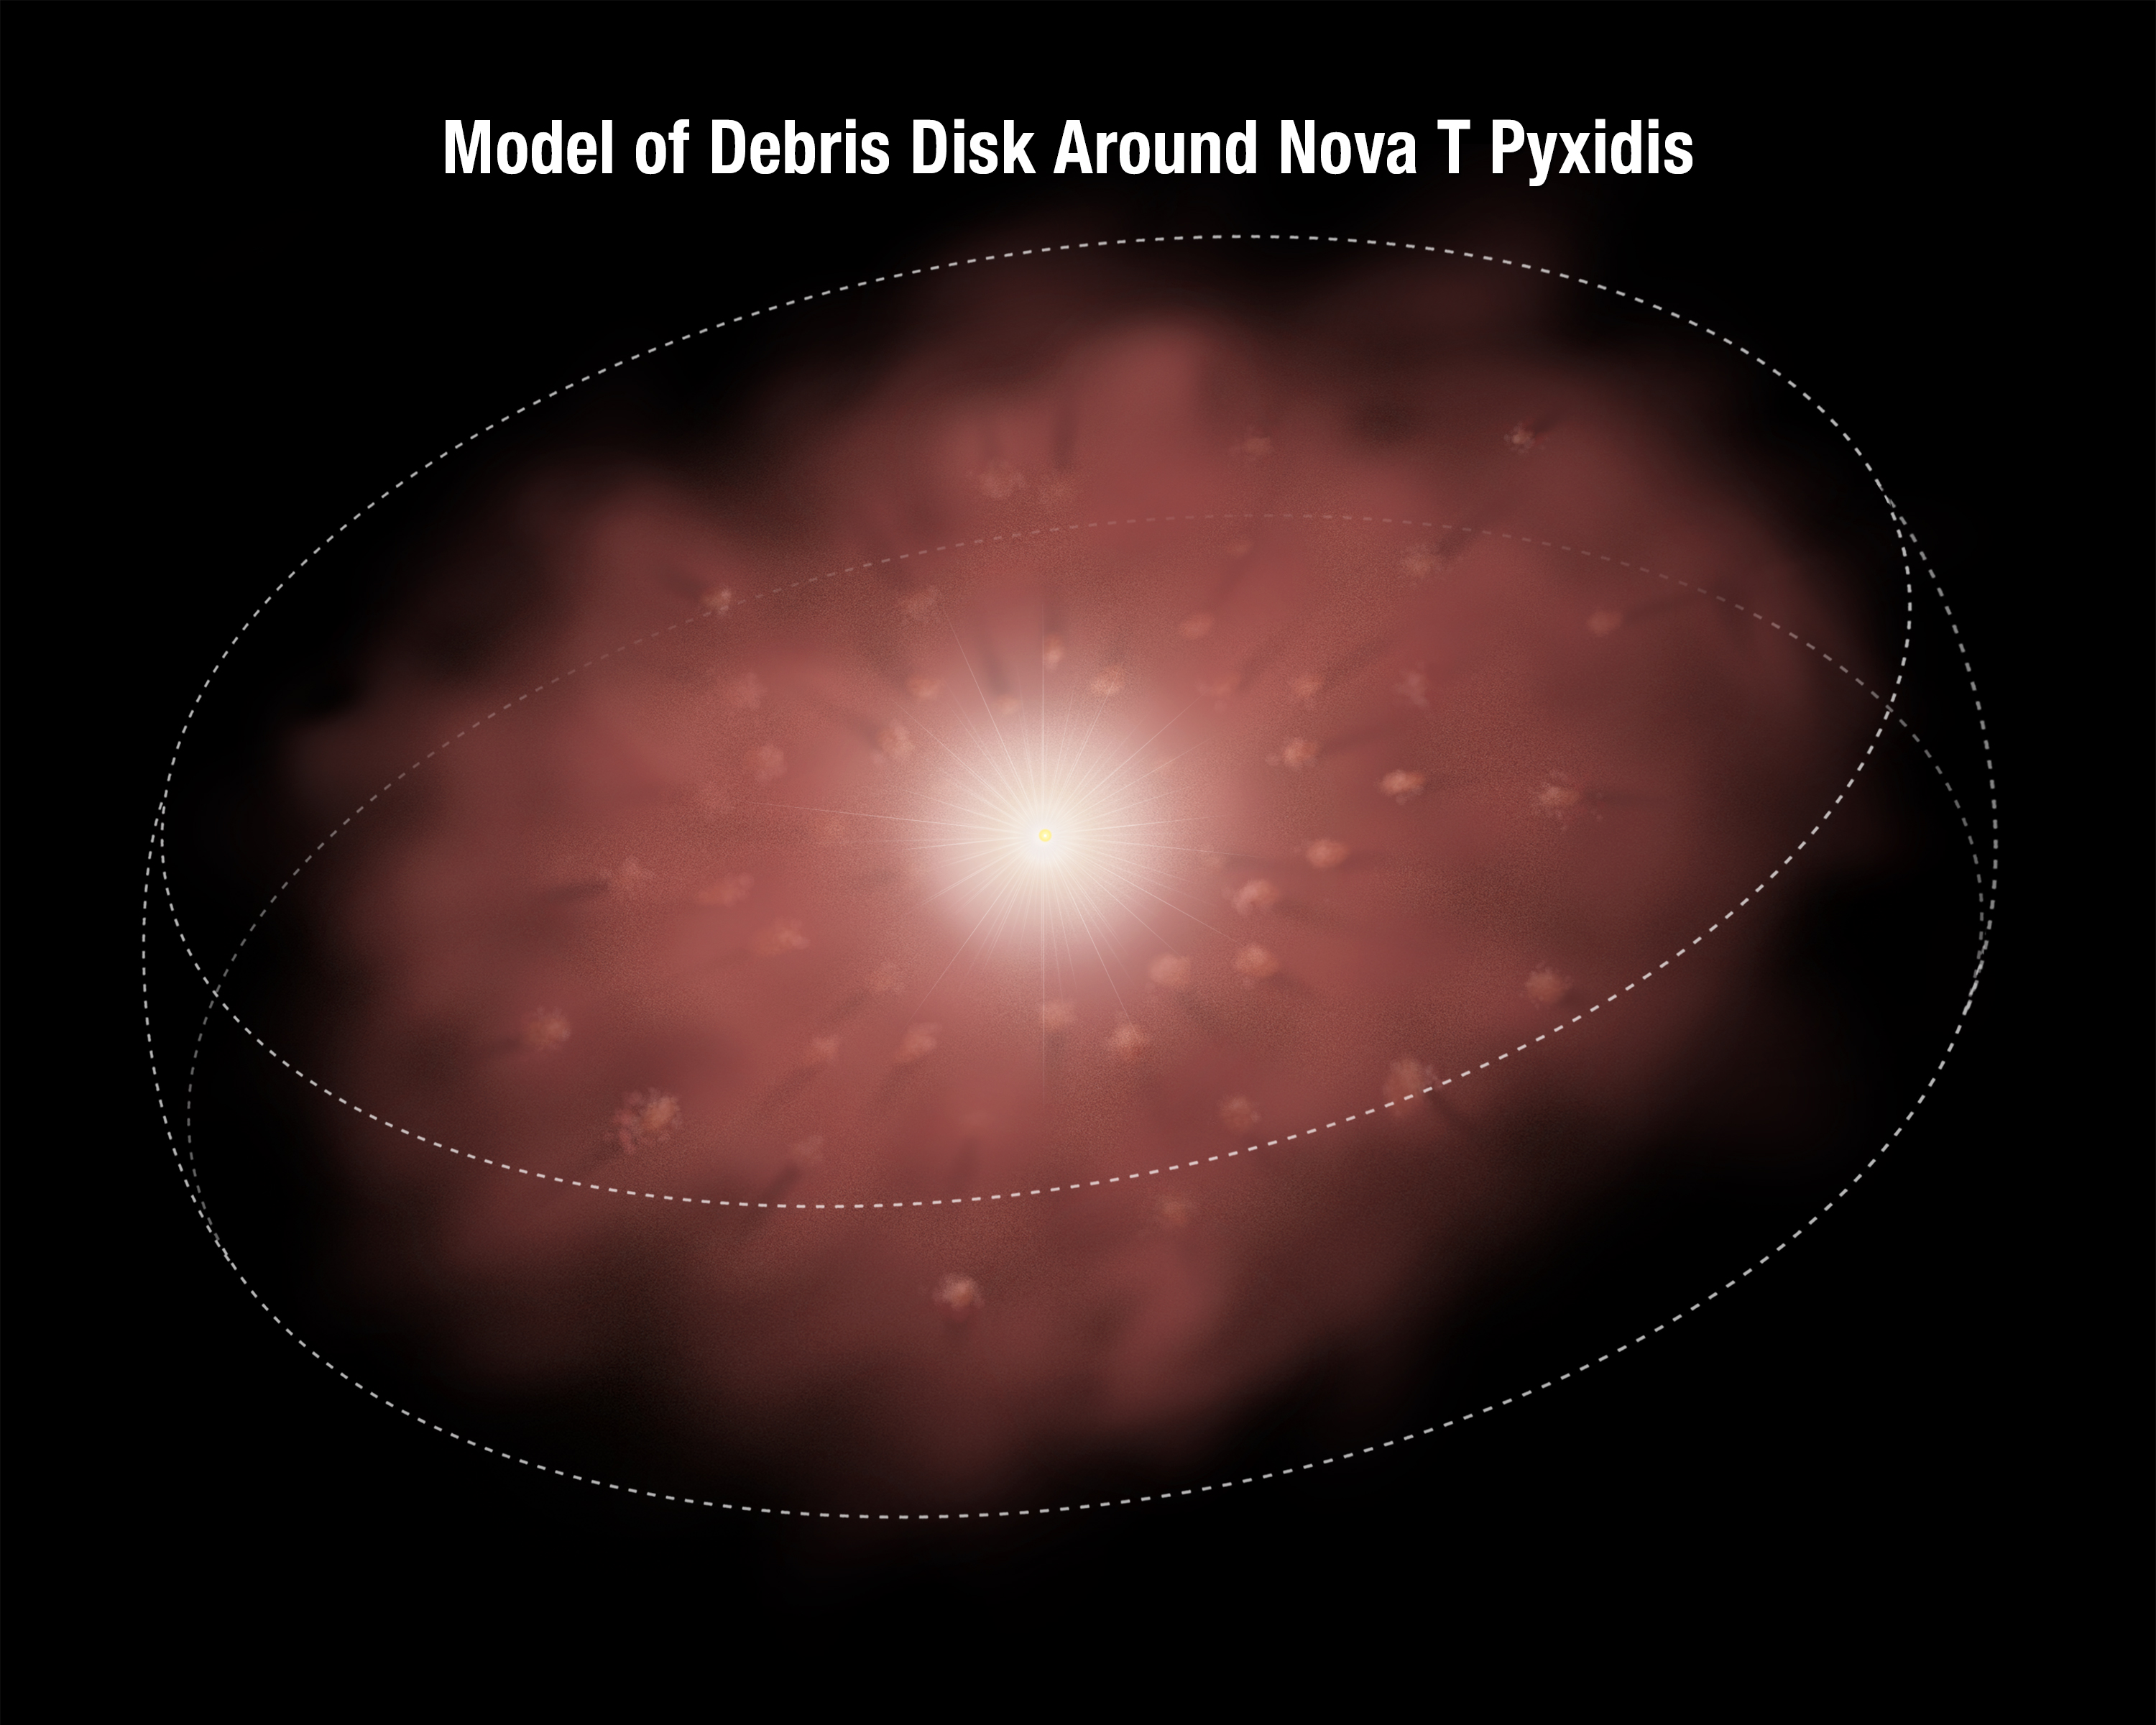

Anatomy of the debris disc around T Pyxidis

This illustration shows a disc of material ejected by an erupting star called T Pyxidis, otherwise known as T Pyx. T Pyx is a recurrent nova, erupting every 12 to 50 years and ejecting material that has formed the disc around the bright star. The disc is full of clumps of material that have comet-like tails pointing away from the star.

Credit: NASA, ESA, and A. Feild (STScI)